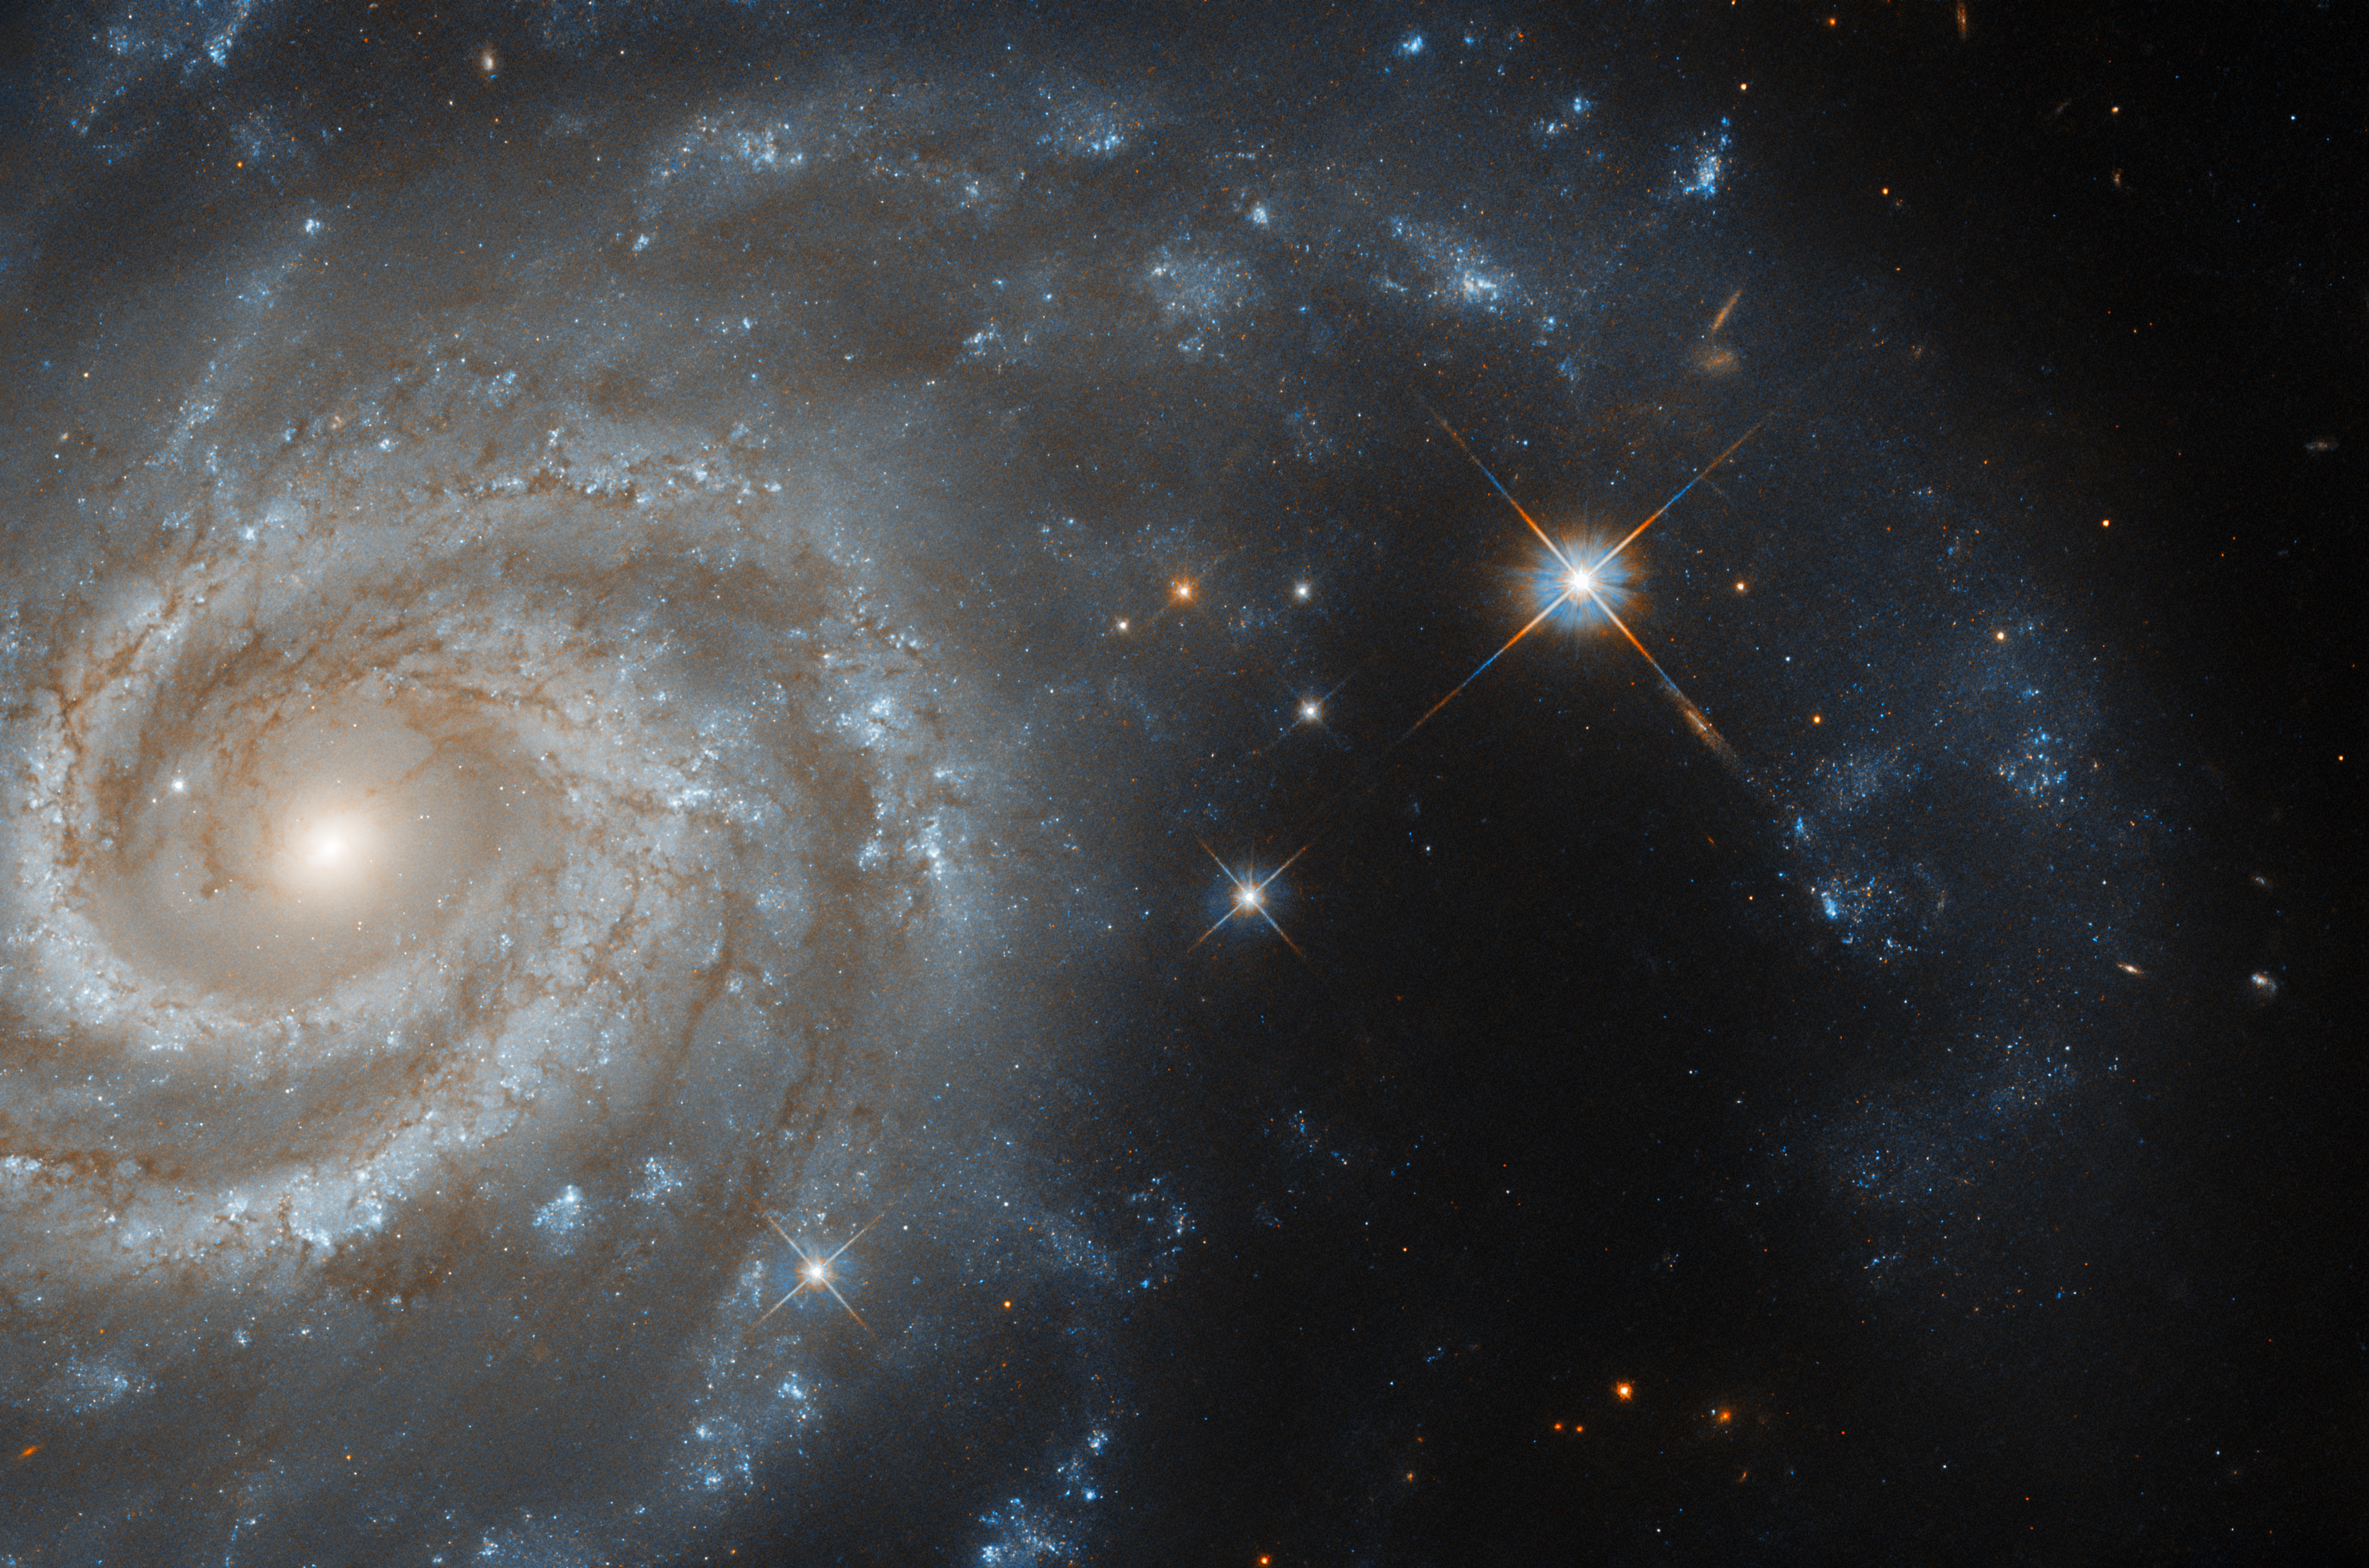

Luminous in Lepus

This image shows the spiral galaxy IC 438, which lies about 130 million light-years from Earth in the constellation Lepus (the Hare). Lepus lies just south of the celestial equator (the ring around the middle of Earth that falls at right angles to its rotation axis). Appropriately, Lepus is flanked by the constellations Canis Major (the Greater Dog) and Orion (the Hunter), whilst Canis Minor (the Lesser Dog) lies very nearby, meaning that in artistic representations of the constellations, Lepus is often shown as being pursued by Orion and his two hunting dogs.

Lepus is one of the 88 constellations that are officially recognised by the International Astronomical Union (IAU). It is worth clarifying that, whilst the actual constellations themselves only comprise a handful of stars, the area of sky covered by those stars is often referred to using the name of the constellation. For example, when we say that IC 438 is in Lepus, we do not mean that the galaxy is part of the constellation — perhaps obviously, as it is not a single star, but an entire galaxy! Rather, we mean that it falls in the region of sky covered by the Lepus constellation stars.

The IAU’s 88 official constellations are by no means the only constellations ever described by humanity. Humans have been studying and naming the stars for a very long time, and different cultures of course have their own constellations. The IAU constellations are Eurocentric, with many taken from Ptolemy’s list of constellations. Collectively, the 88 constellations divide the night sky into 88 regions which completely cover it, so that the approximate location of any celestial object can be described using one of the 88.

The impetus behind Hubble examining this galaxy was a type Iax supernova that took place in 2017, a kind of supernova that arises from a binary system of two stars. While this data was obtained over three years after the supernova occurred, and so it’s not visible in this image, there’s still a lot to learn from studying the aftermath of supernovae like this one.

Credit: ESA/Hubble & NASA, R. J. Foley (UC Santa Cruz)